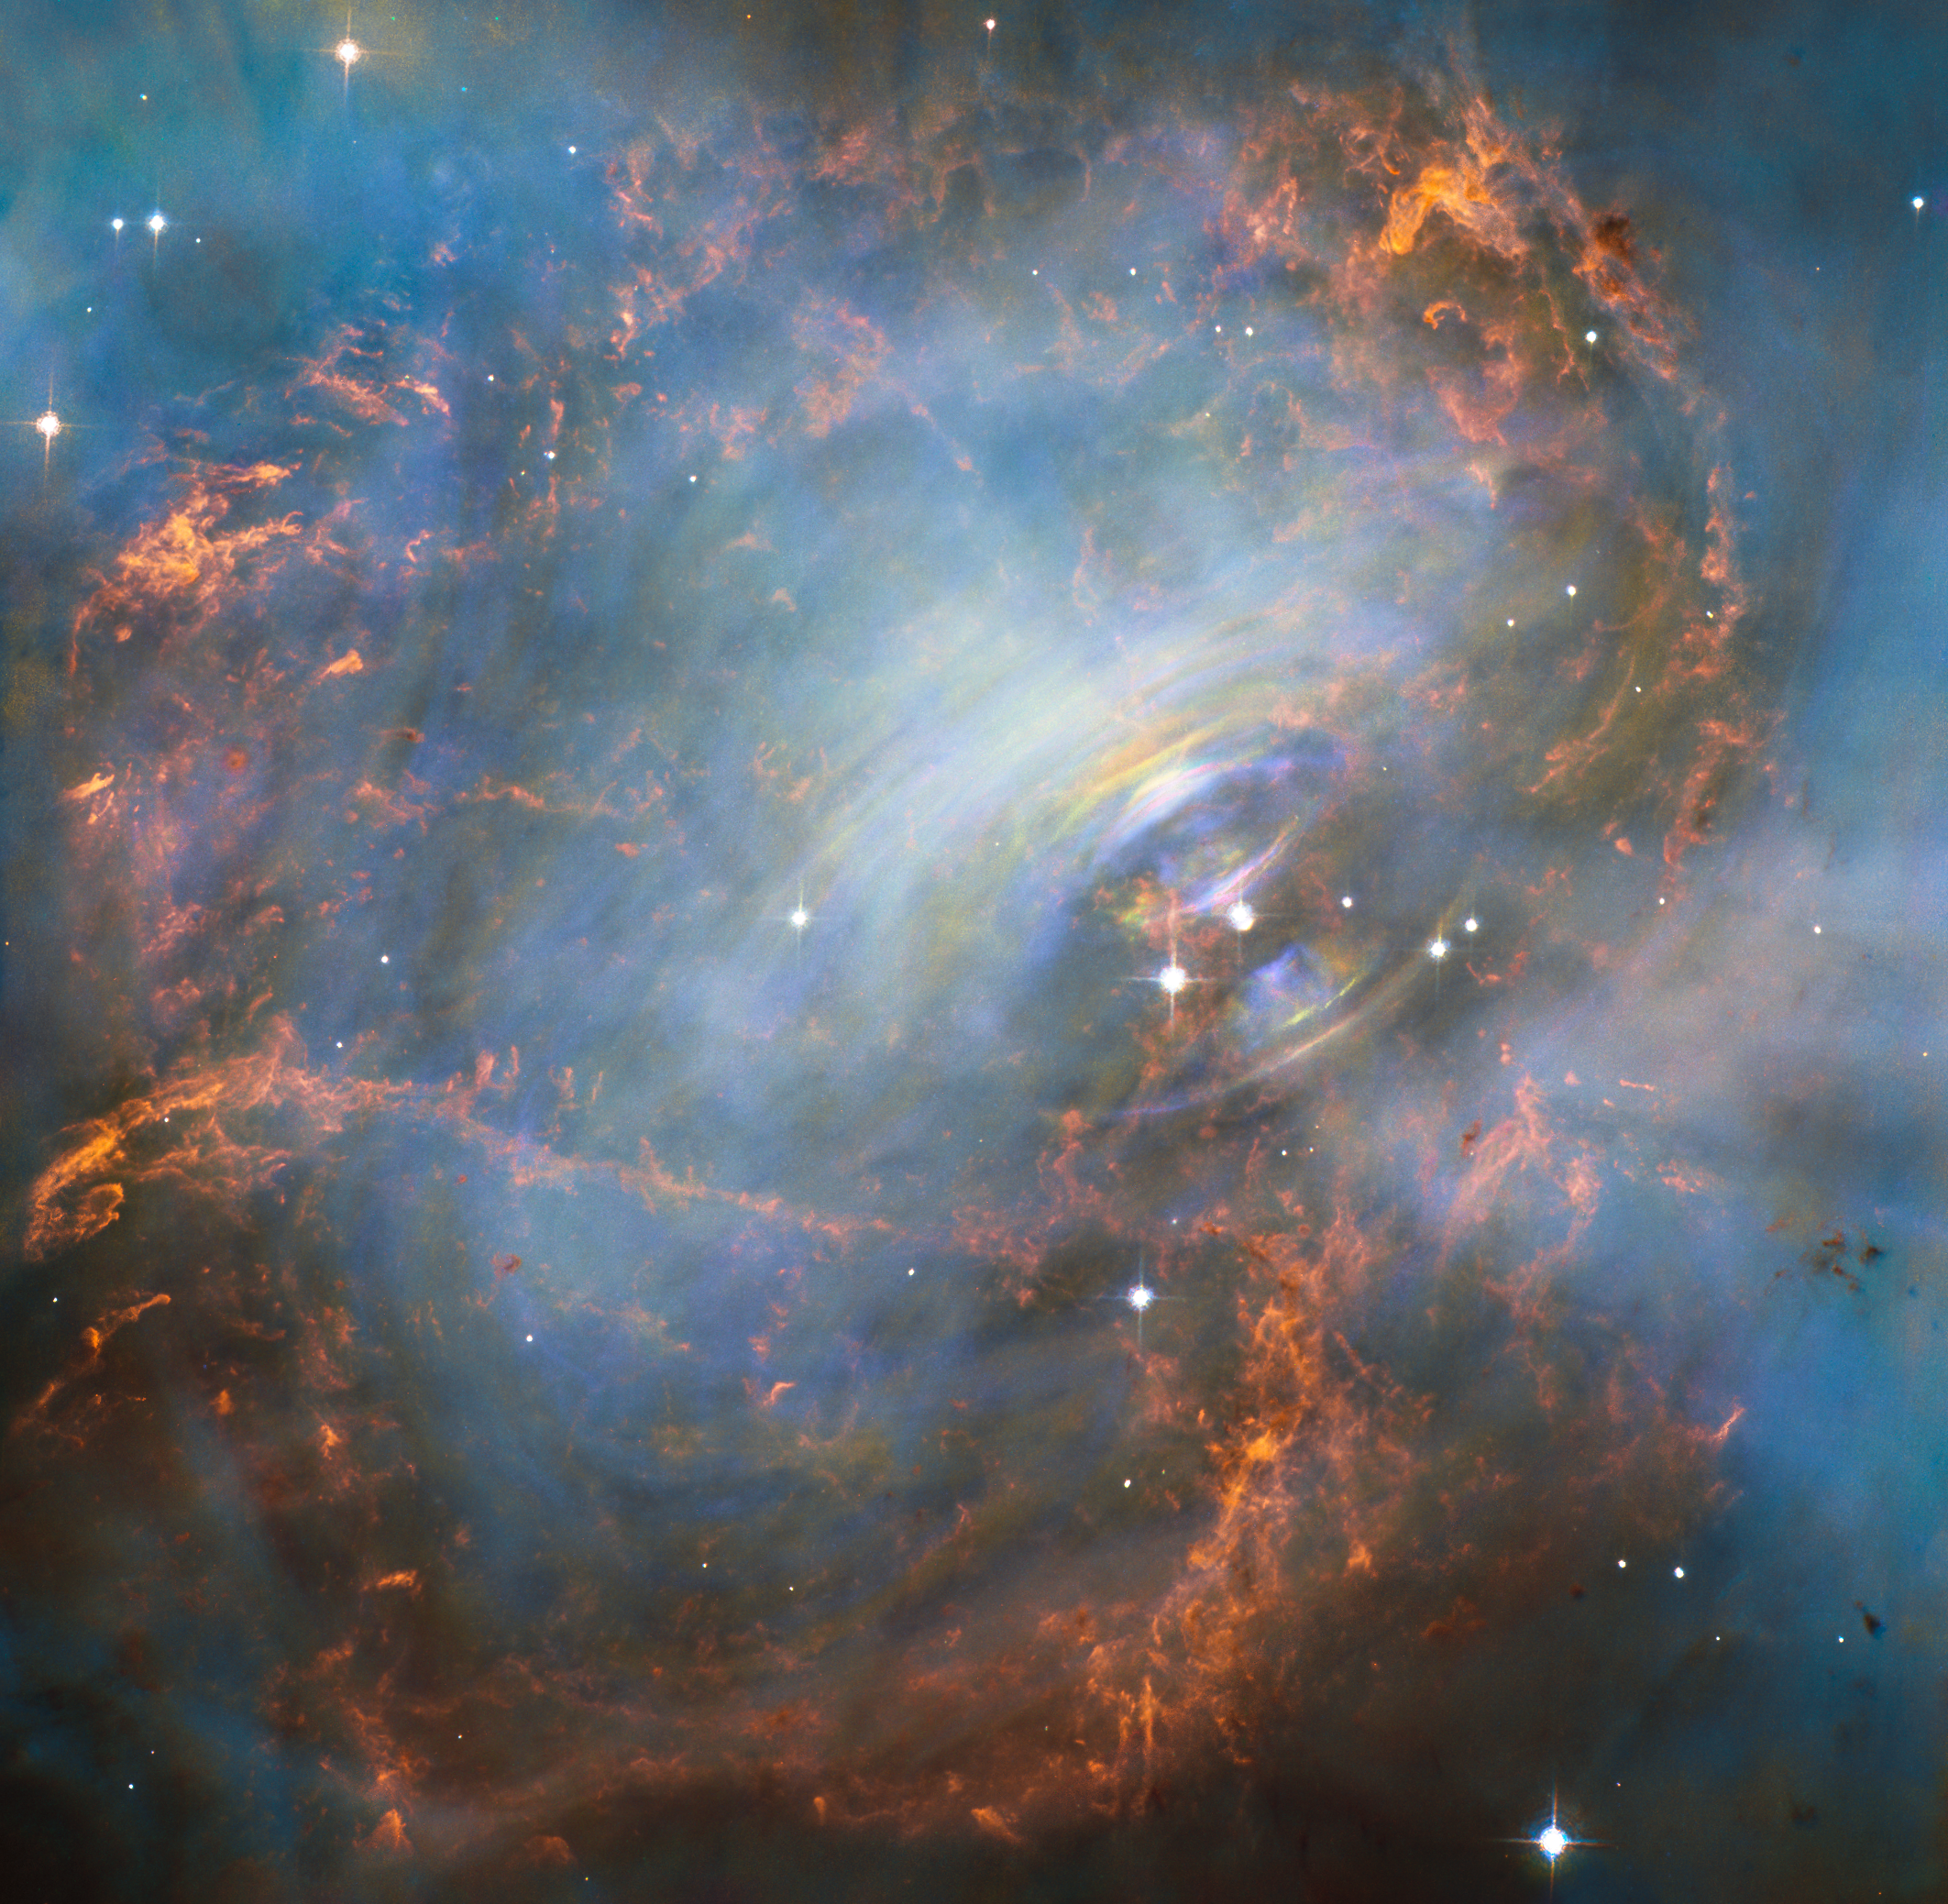

Moving heart of the Crab Nebula

While many other images of the famous Crab Nebula have focused on the filaments in the outer part of the nebula, this image shows the very heart of the Crab Nebula including the central neutron star — it is the rightmost of the two bright stars near the centre of this image.

The rapid motion of the material nearest to the central star is revealed by the subtle rainbow of colours in this time-lapse image, the rainbow effect being due to the movement of material over the time between one image and another.

Credit: ESA/Hubble & NASA Acknowledgement: Mahdi Zamani